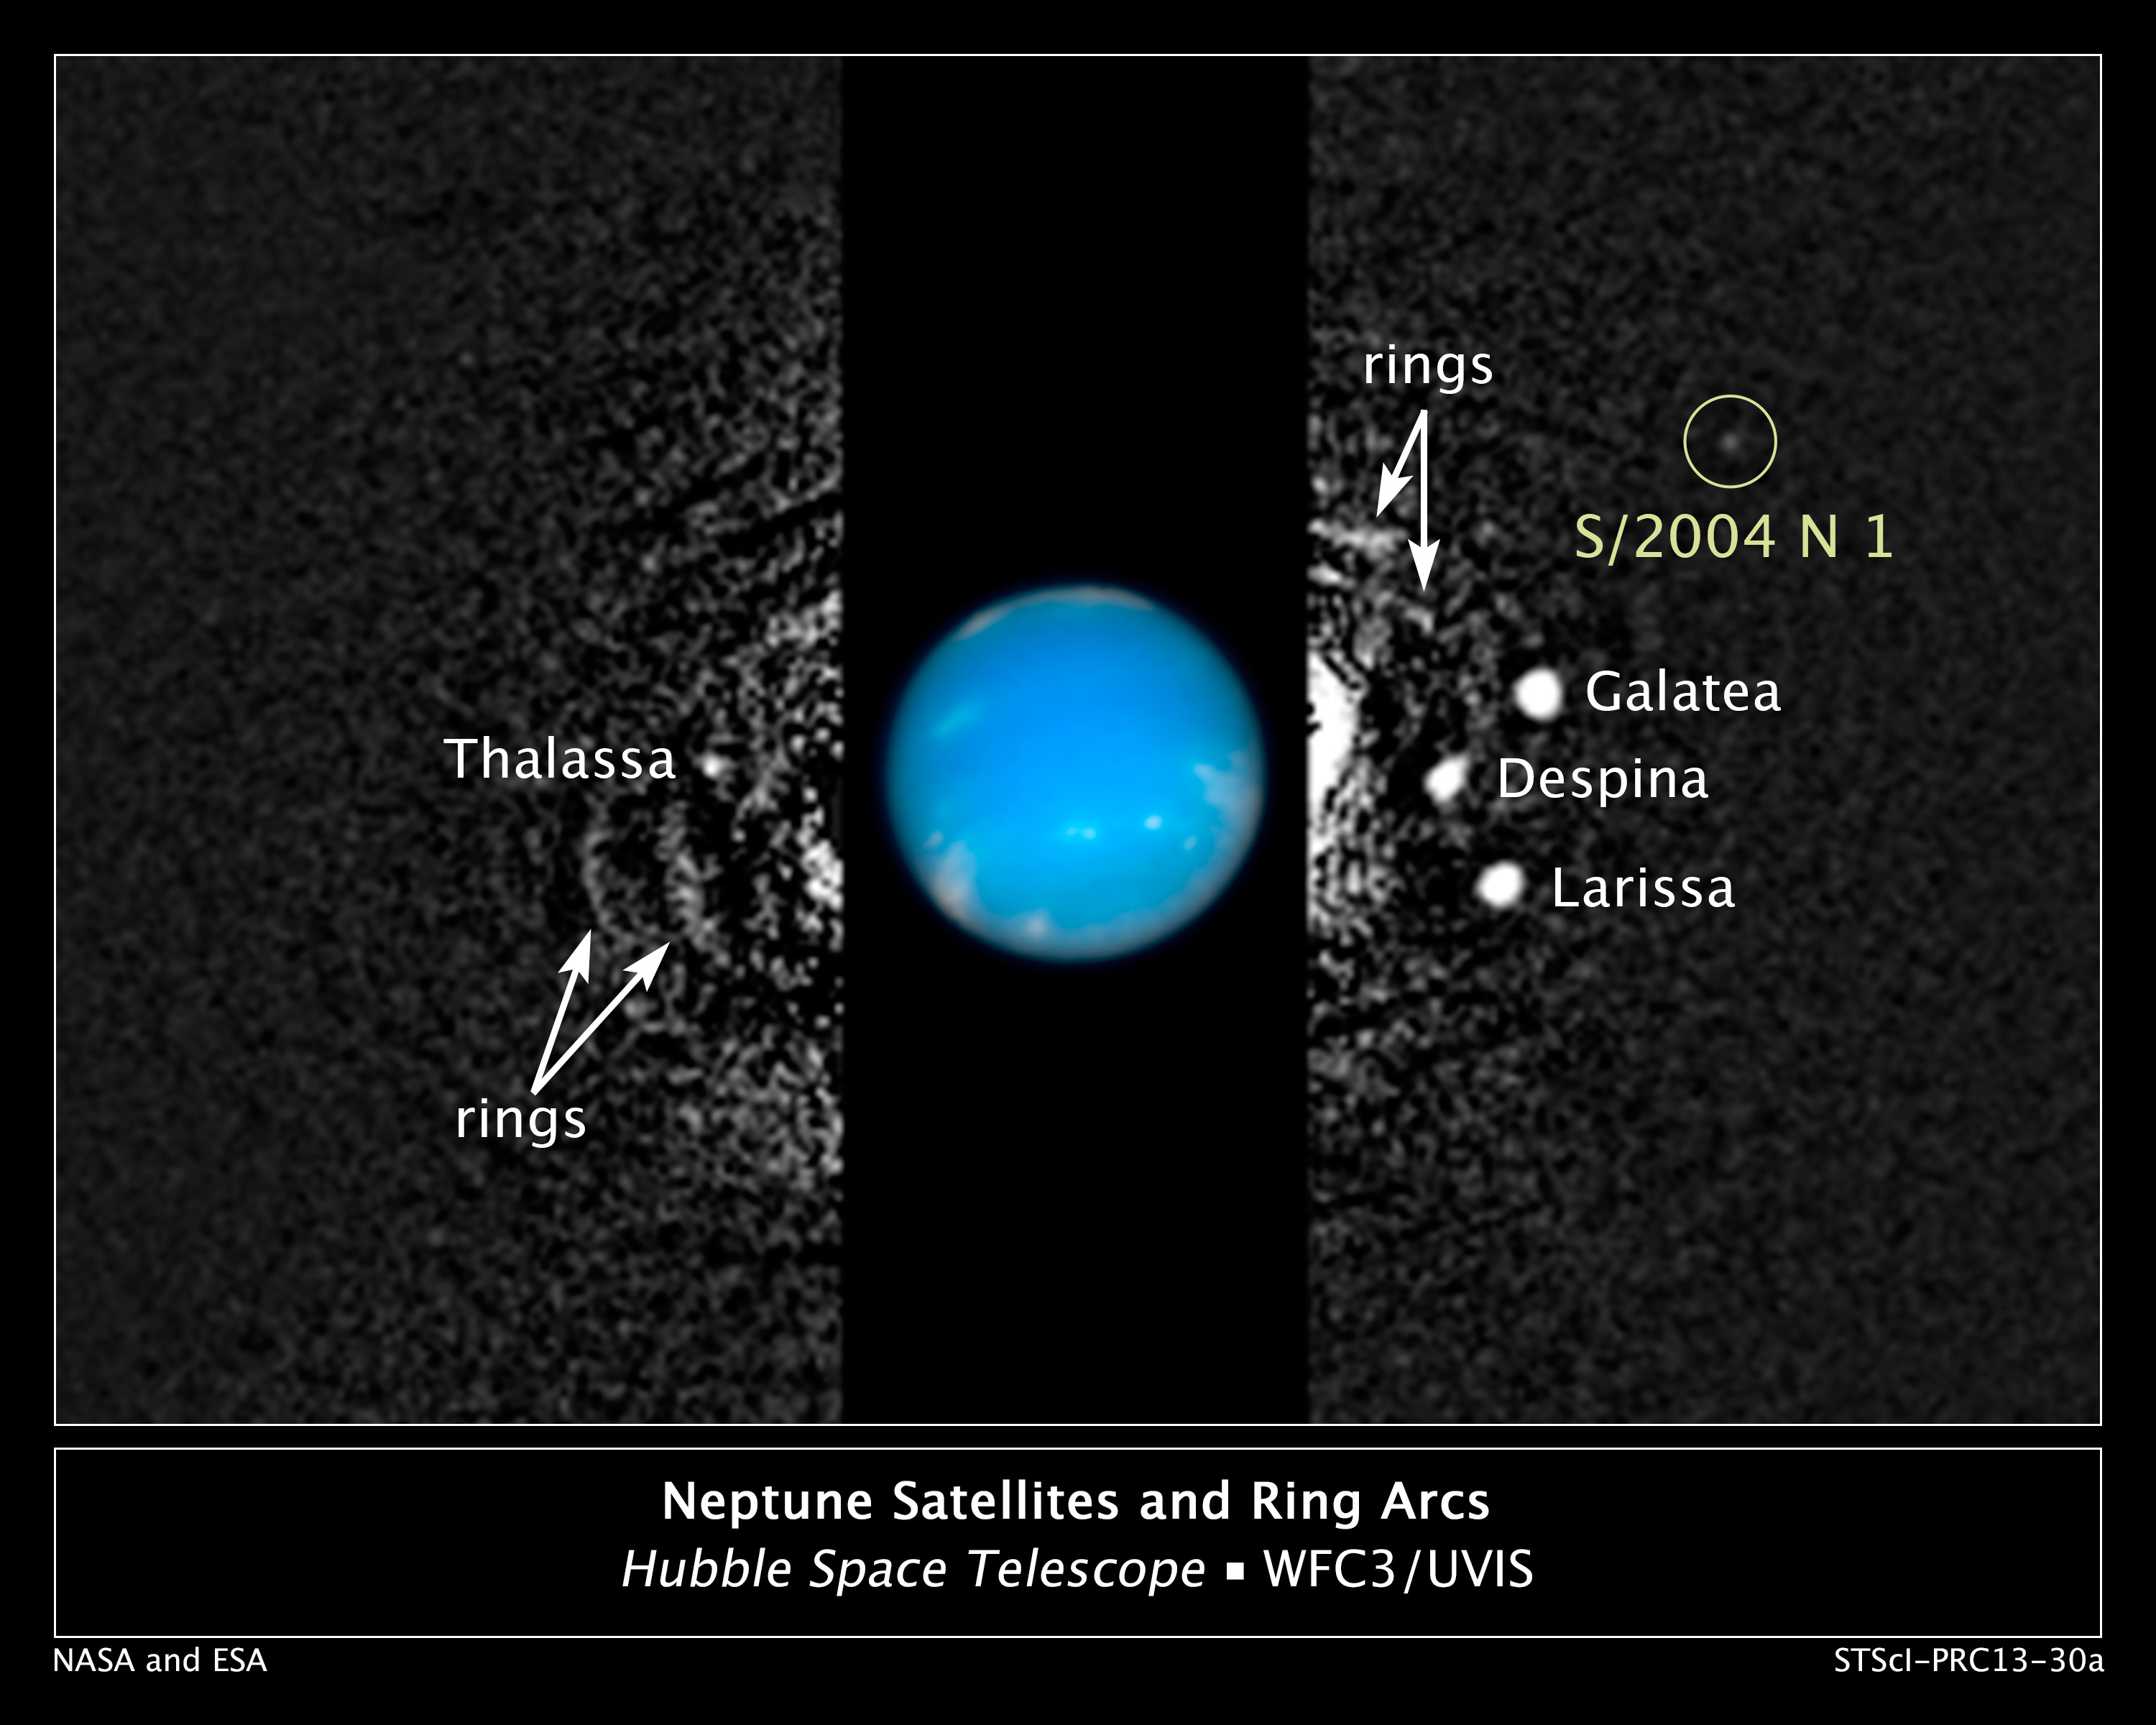

Hubble finds new moon orbiting Neptune

This composite NASA/ESA Hubble Space Telescope image shows the location of a newly-discovered moon, designated S/2004 N 1, orbiting the giant planet Neptune, just under 5 billion kilometres from Earth.

The moon is so small (no more than 20 kilometres across) and dim, it was missed by NASA's Voyager 2 spacecraft cameras when the probe flew by Neptune in 1989. Several other moons that were discovered by Voyager appear in this 2009 image, along with a circumplanetary structure known as ring arcs.

Mark Showalter of the SETI Institute discovered S/2004 N 1 in July 2013. He analysed over 150 archival Neptune photographs taken by Hubble from 2004 to 2009. The same white dot appeared over and over again. He then plotted a circular orbit for the moon, which completes one revolution around Neptune every 23 hours.

The black-and-white image was taken in 2009 with Hubble's Wide Field Camera 3 in visible light. Hubble took the colour inset of Neptune on August 19, 2009.

Credit: NASA, ESA, and M. Showalter (SETI Institute)